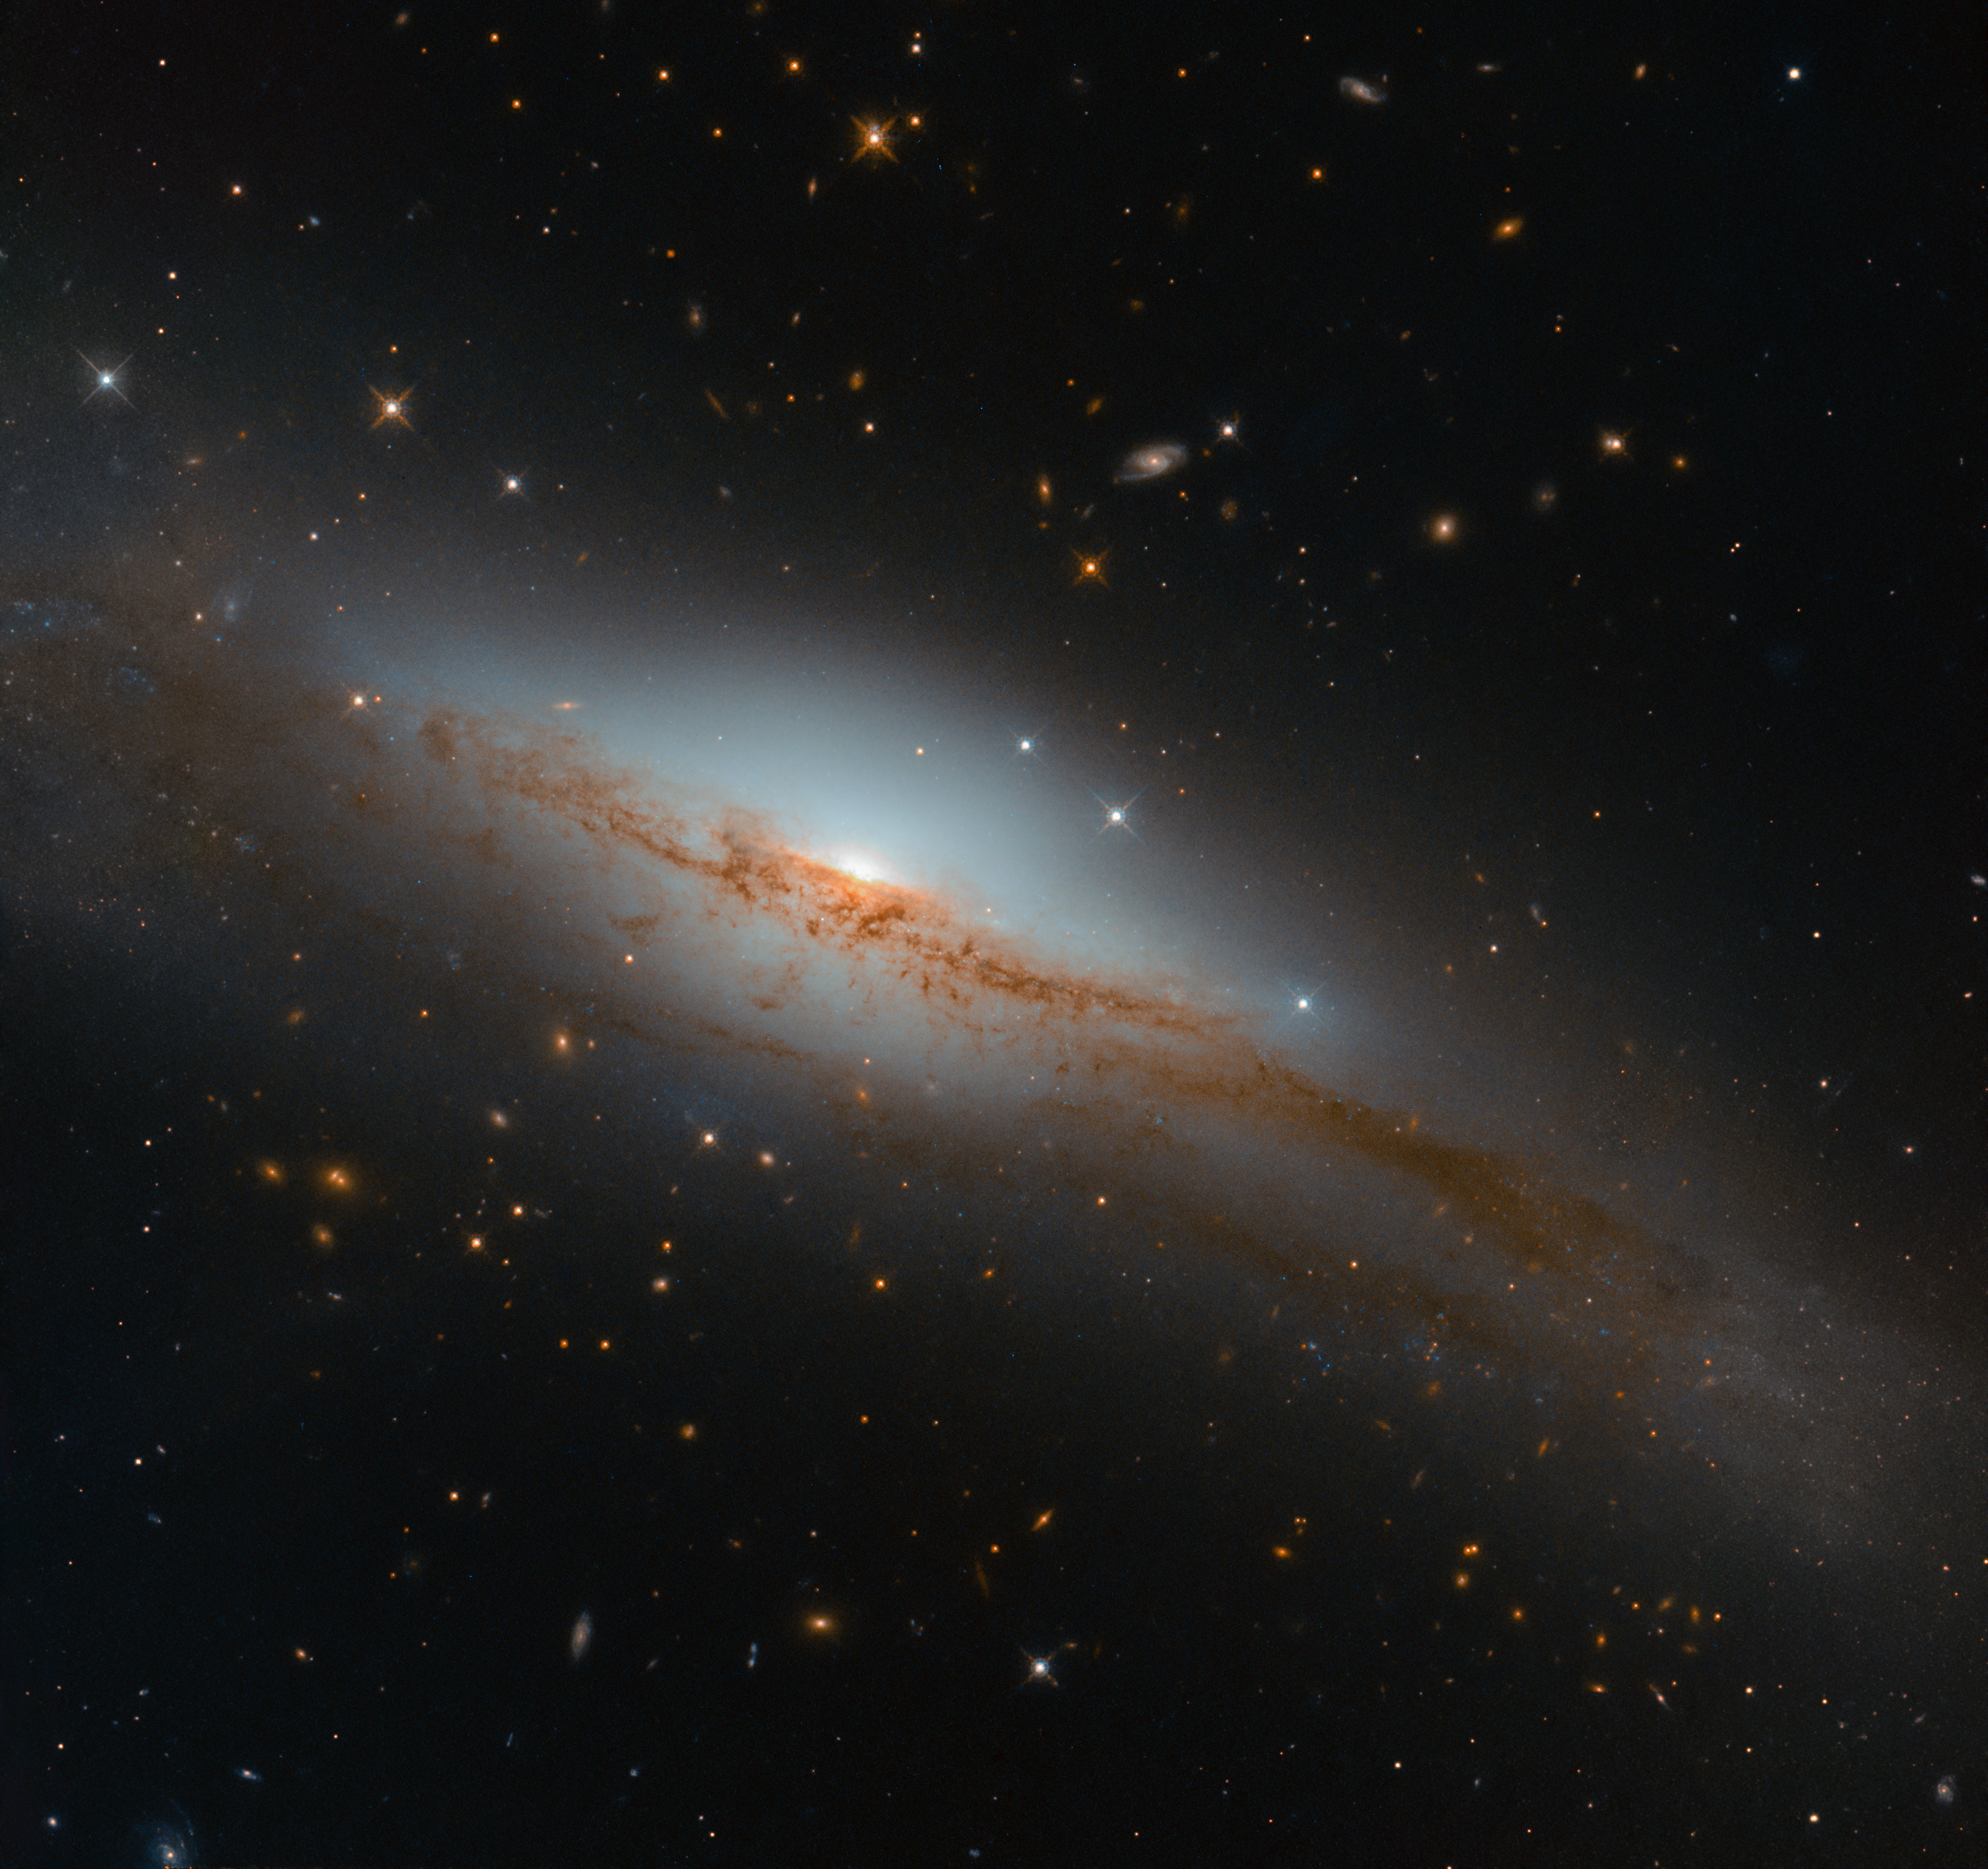

Emission Versus Absorption

For this Picture of the Week, the NASA/ESA Hubble Space Telescope turned its powerful eye towards an emission line galaxy called NGC 3749.

When astronomers explore the contents and constituent parts of a galaxy somewhere in the Universe, they use various techniques and tools. One of these is to spread out the incoming light from that galaxy into a spectrum and explore its properties. This is done in much the same way as a glass prism spreads white light into its constituent wavelengths to create a rainbow. By hunting for specific signs of emission from various elements within a galaxy’s spectrum of light — so-called emission lines — or, conversely, the signs of absorption from other elements — so-called absorption lines — astronomers can start to deduce what might be happening within.

If a galaxy’s spectrum shows many absorption lines and few emission lines, this suggests that its star-forming material has been depleted and that its stars are mainly old, while the opposite suggests it might be bursting with star formation and energetic stellar newborns. This technique known as spectroscopy, can tell us about a galaxy’s type and composition, the density and temperature of any emitting gas, the star formation rate, or how massive the galaxy’s central black hole might be.

While not all galaxies display strong emission lines, NGC 3749 does! It lies over 135 million light-years away, and is moderately luminous. The galaxy has been used a “control” in studies of especially active and luminous galaxies — those with centres known as active galactic nuclei, which emit copious amounts of intense radiation. In comparison to these active cousins, NGC 3749 is classified as inactive, and has no known signs of nuclear activity.

Credit: ESA/Hubble & NASA, D. Rosario et al.